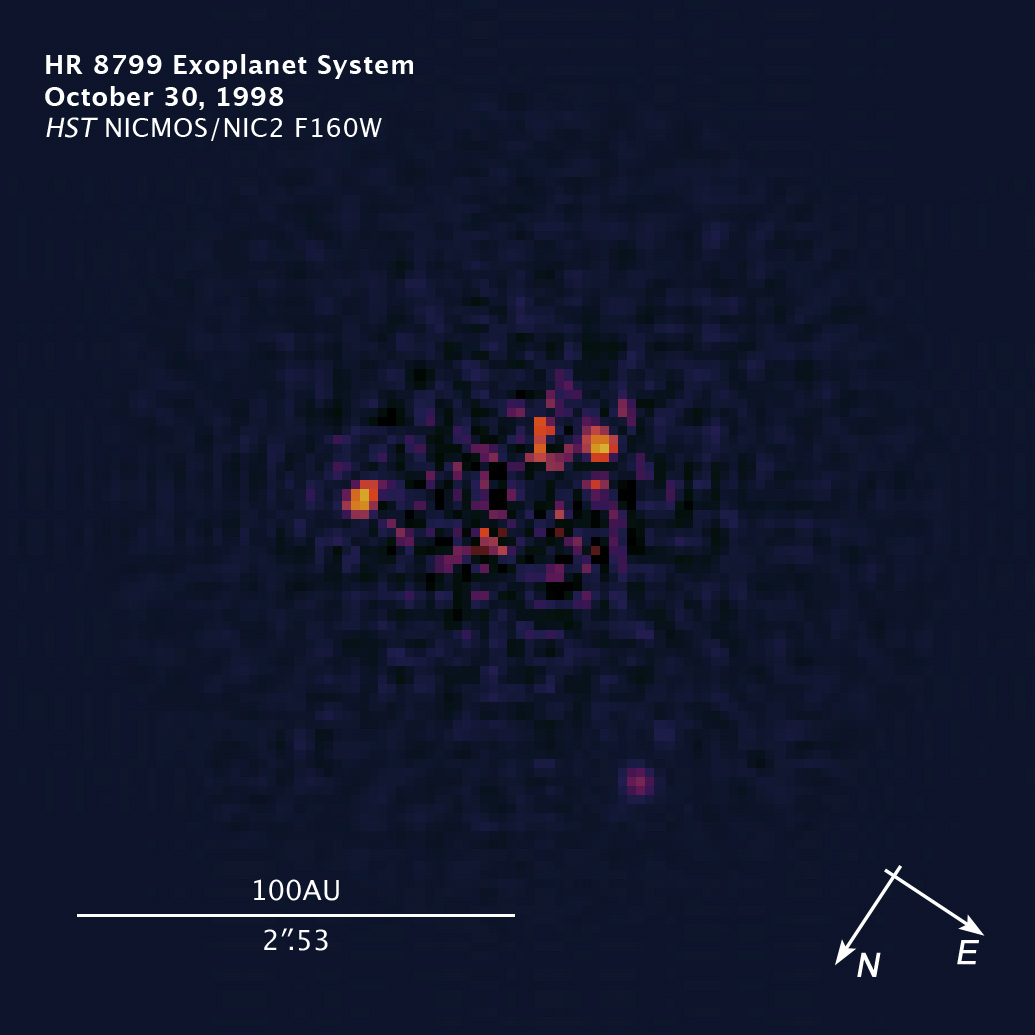

Compass and scale image of HR 8799

Compass and scale image of HR 8799.

Credit: NASA, ESA, and Z. Levay (STScI). Science Credit: NASA, ESA, and R. Soummer (STScI)